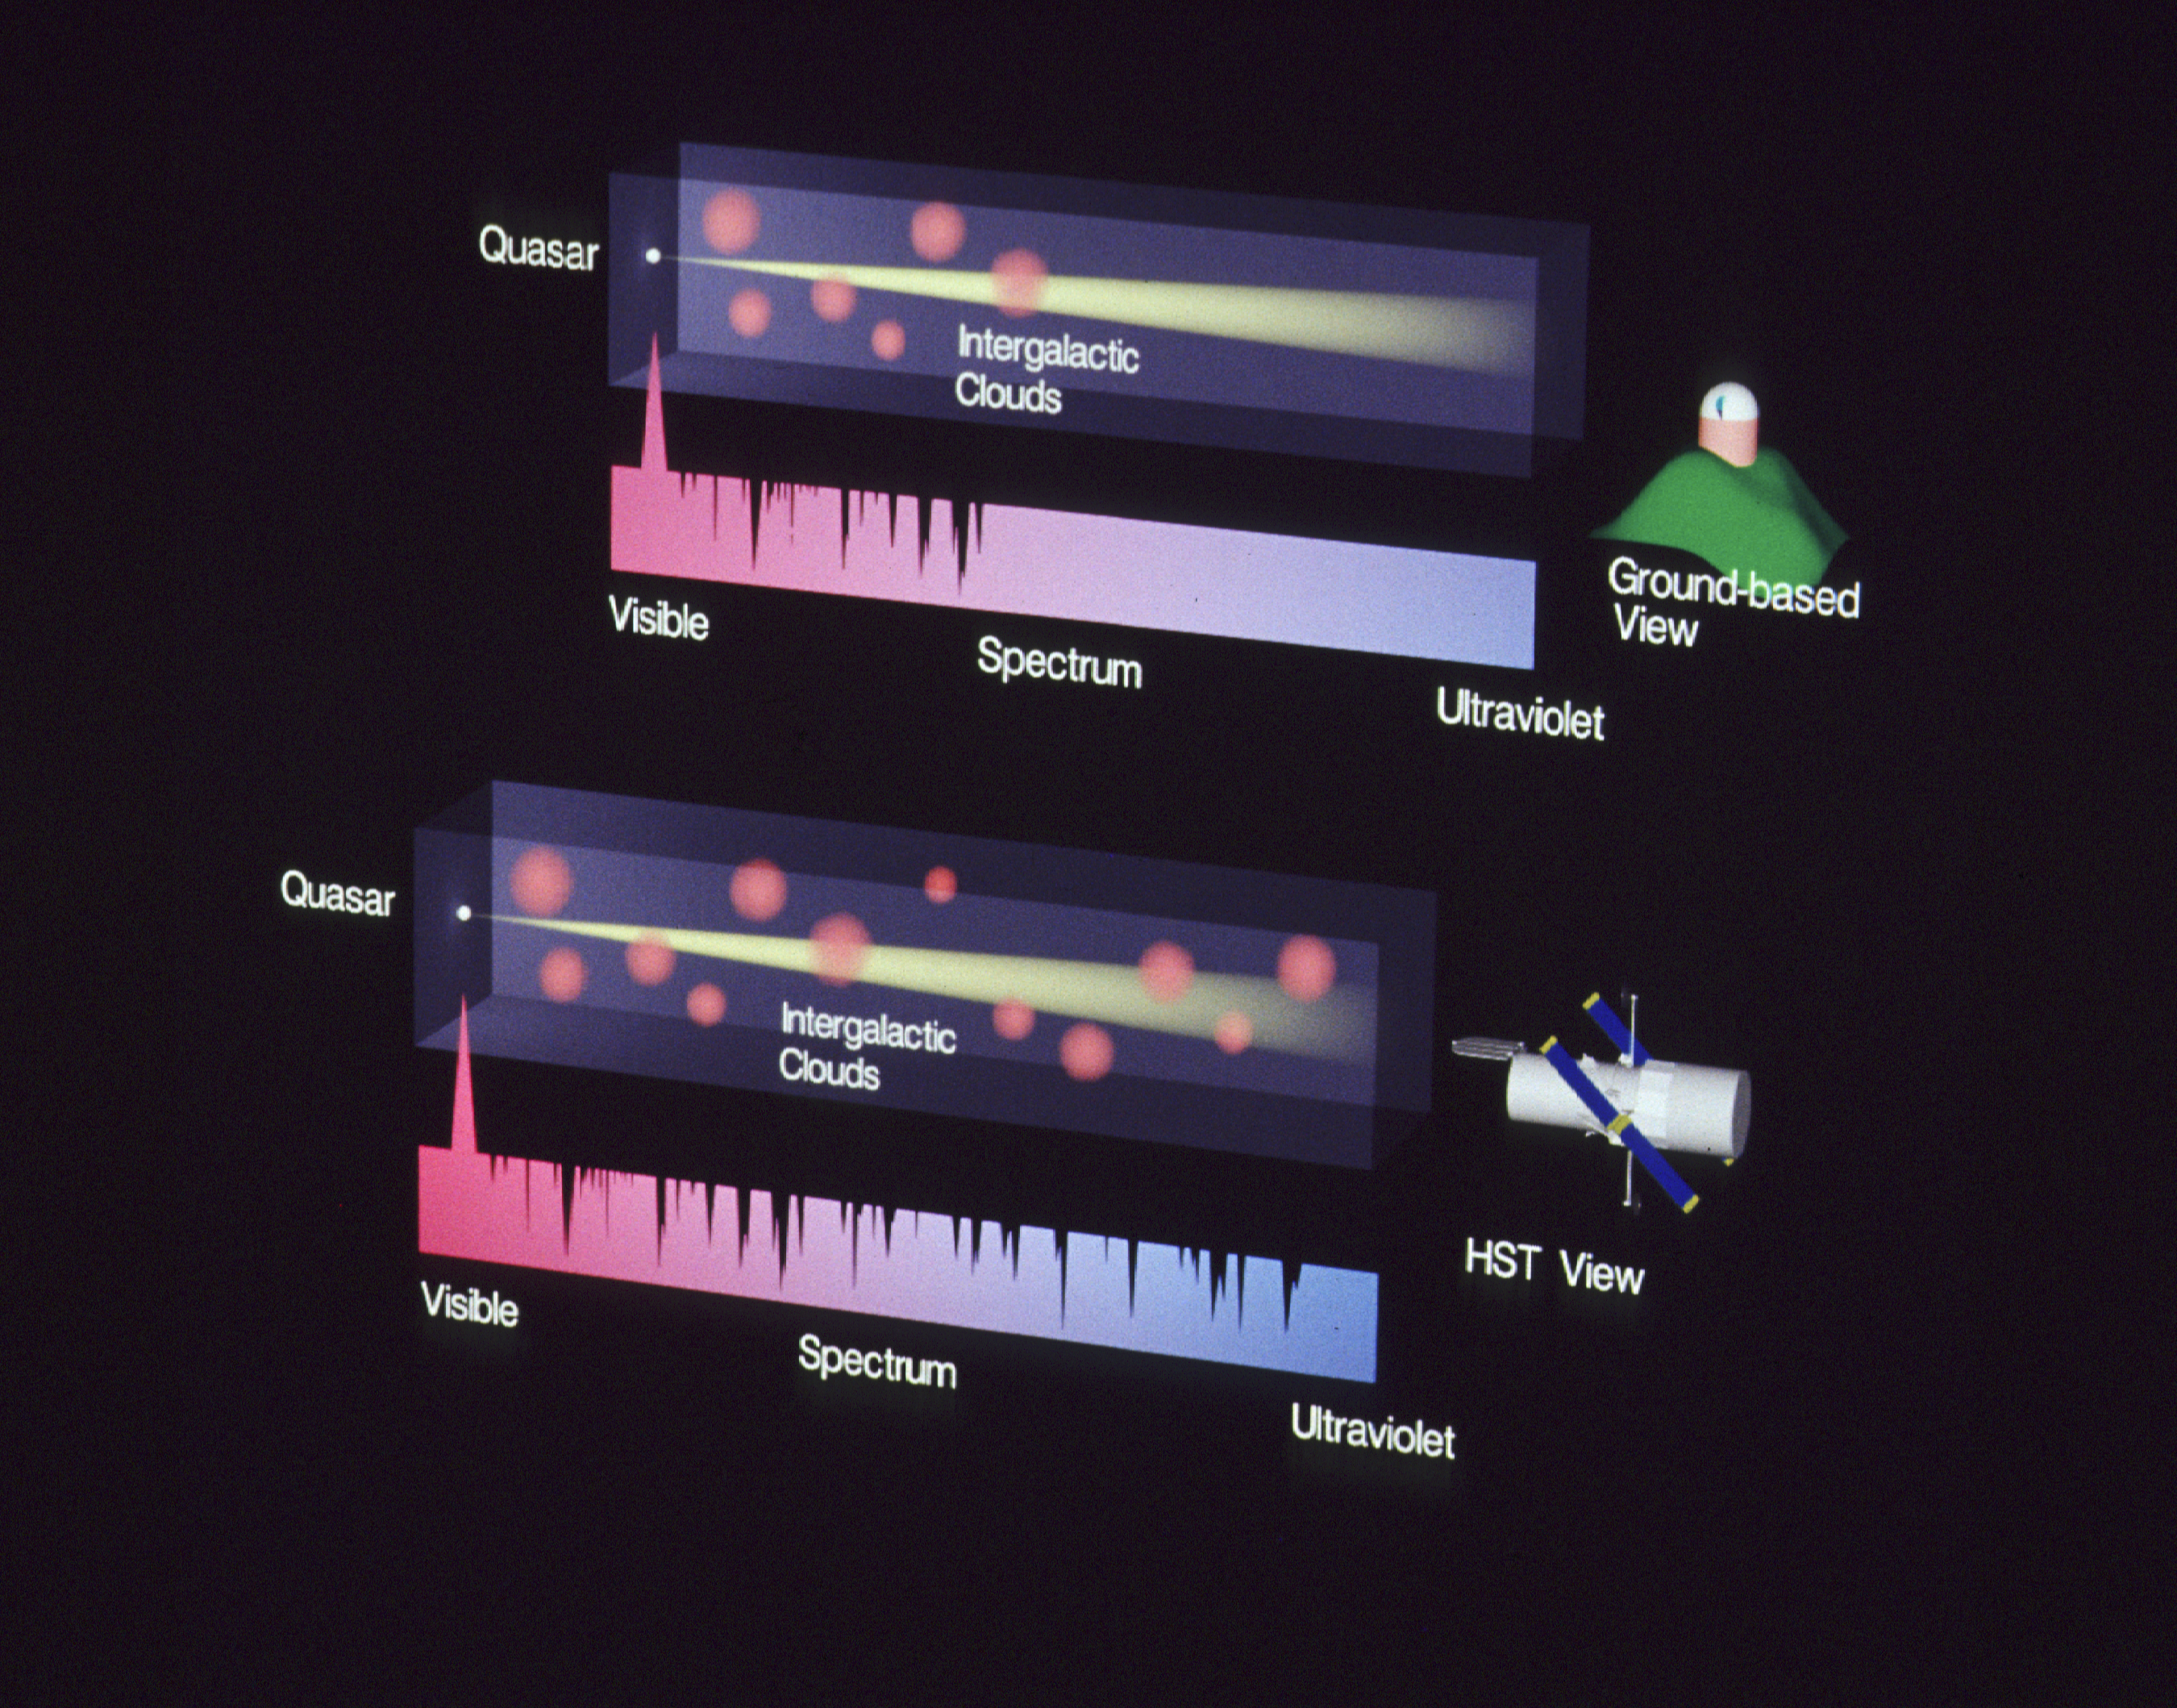

Intergalactic absorbtion clouds

[Top Diagram]
The transparent block schematically represents a column of space between a distant quasar and a telescope on earth. As the quasar's light travels across space, invisible, intervening clouds of hydrogen gas absorb certain frequencies of the light. This creates complex "thickets" of absorption features, schematically shown in the spectrum below the box. Ground-based observations have shown that the number of these clouds rapidly rises as one looks back in time.

[Bottom Diagram]
Hubble Space Telescope dramatically changed this picture in 1991 when independent observations made with the HST's Faint Object Spectrograph (OS) and Goddard High Resolution Spectrograph (GHRS) detected more than a dozen hydrogen clouds within less than a billion light-years of our galaxy. Until the launch of HST, it was impossible detect these clouds because the recession velocity of the nearby clouds is so low that the hydrogen absorption features occur in the far ultraviolet part of the spectrum, which is inaccessible with ground-based telescopes.

Credit: STScI Astronomy Visualization Laboratory